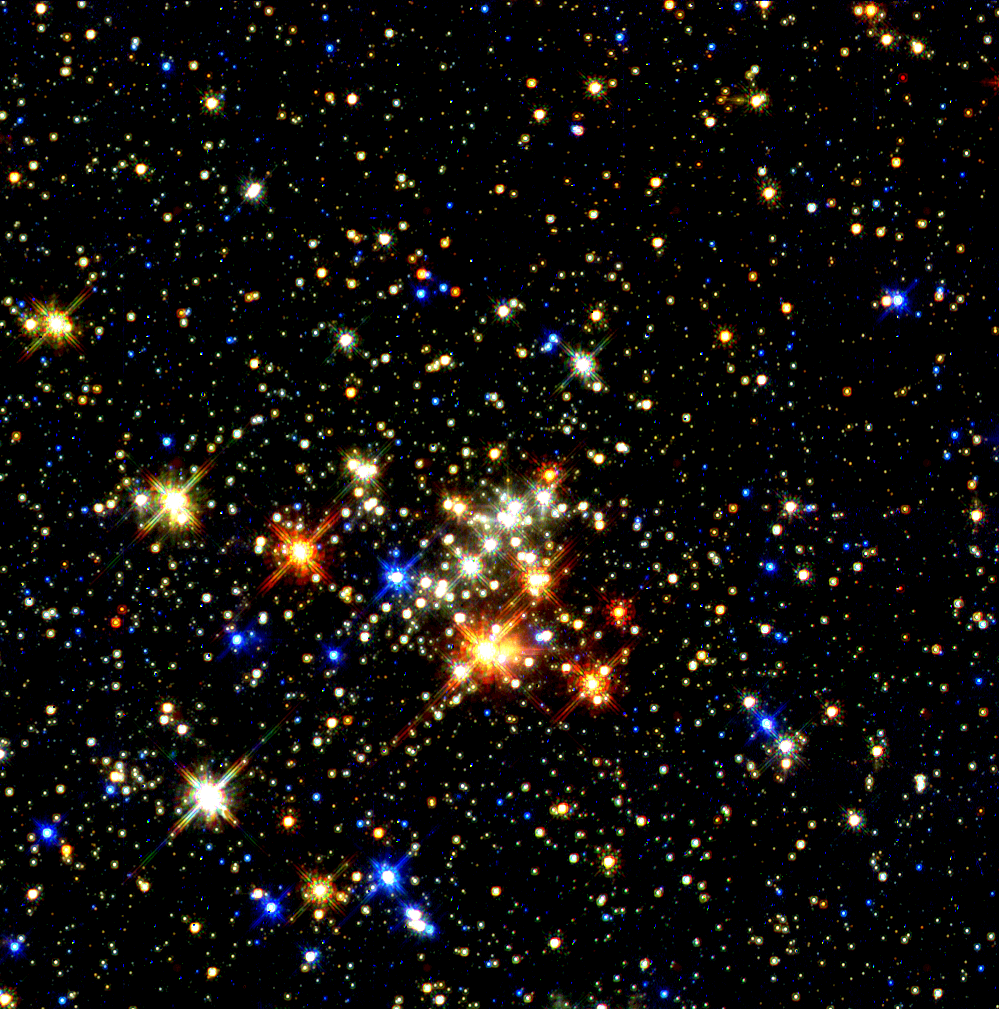

Star clusters near the center of the galaxy

This 4-million-year-old cluster, The Quintuplet Cluster, is more dispersed than the Arches Cluster. It has stars on the verge of blowing up as supernovae. It is the home of the brightest star seen in the Milky Way, called the Pistol star.

Credit: Don Figer ( Space Telescope Science Institute) and NASA/ESA